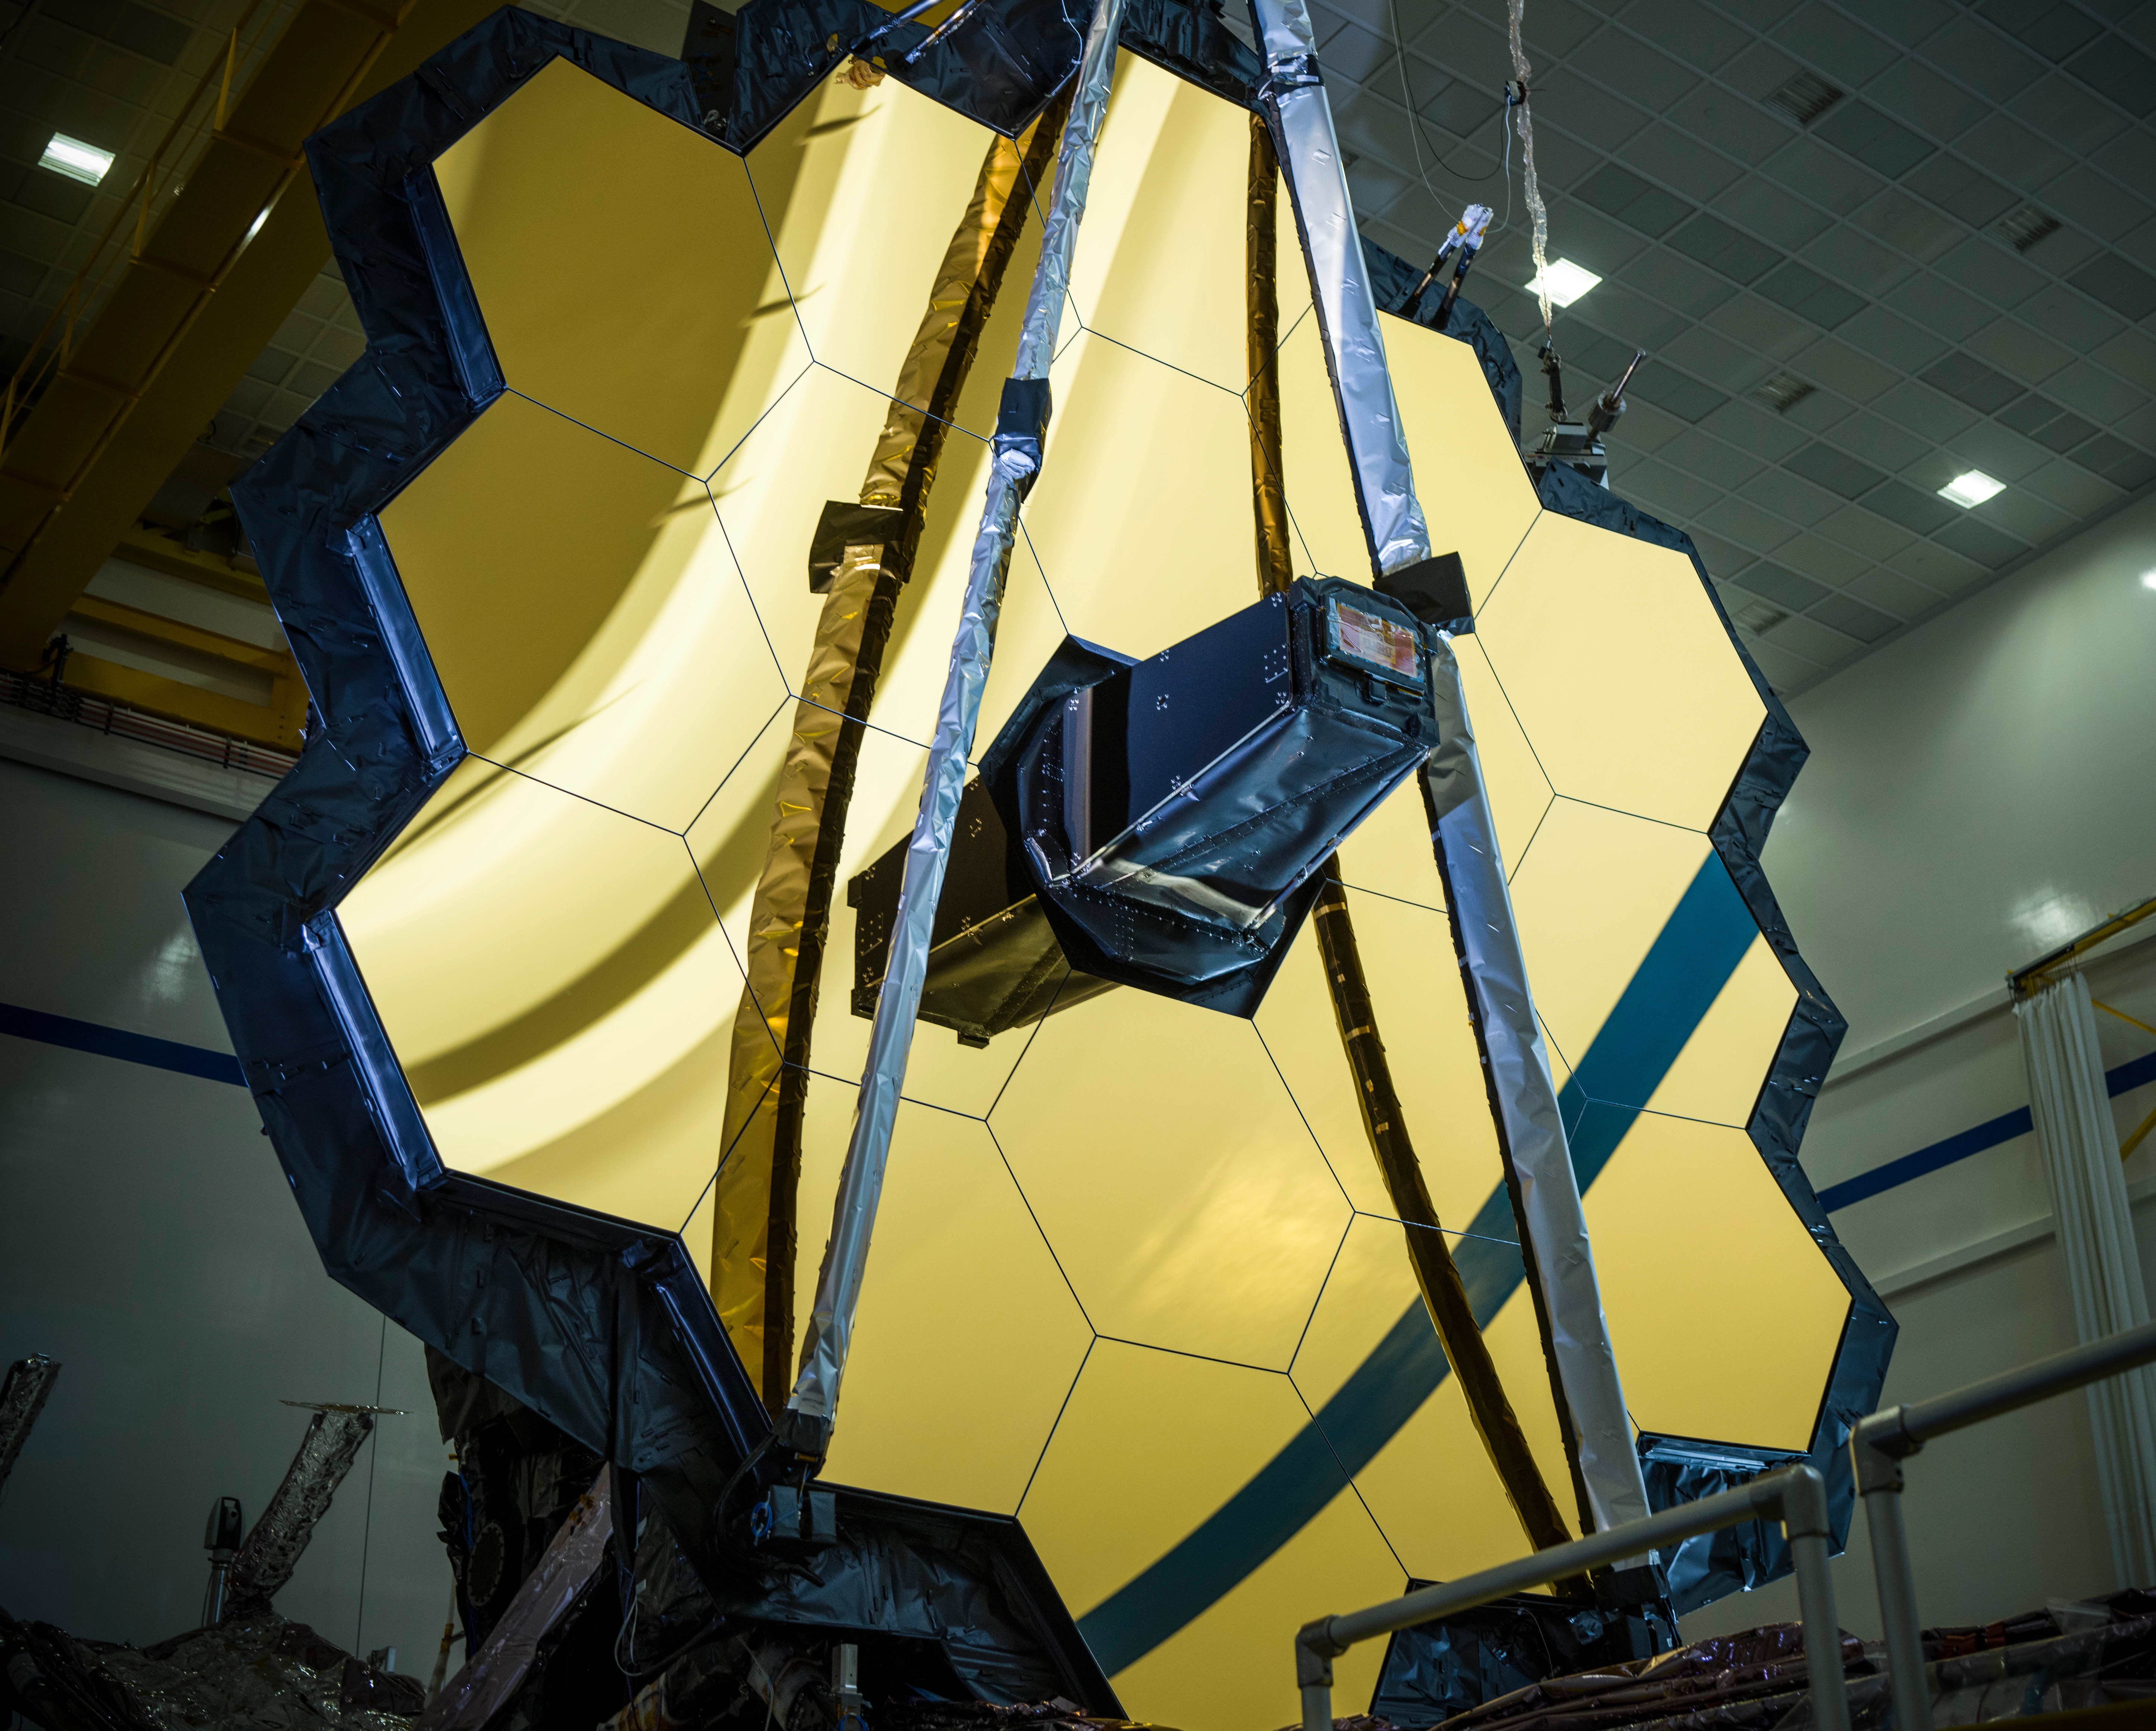

Webb Mirror Closeup

The NASA/ESA/CSA James Webb Space Telescope is shown here with its primary mirror fully deployed during a Comprehensive Systems Test in 2020 at Northrop Grumman in California, USA. This was the first full systems evaluation that was run on the assembled observatory.

Credit: NASA/Chris Gunn